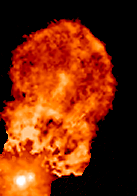

Binary Star XZ Tauri (Frame 2)

This is how XZ Tauri looked in 1998.

Credit: NASA, John Krist ( Space Telescope Science Institute), Karl Stapelfeldt (Jet Propulsion Laboratory), Jeff Hester (Arizona State University), Chris Burrows (European Space Agency/ Space Telescope Science Institute).